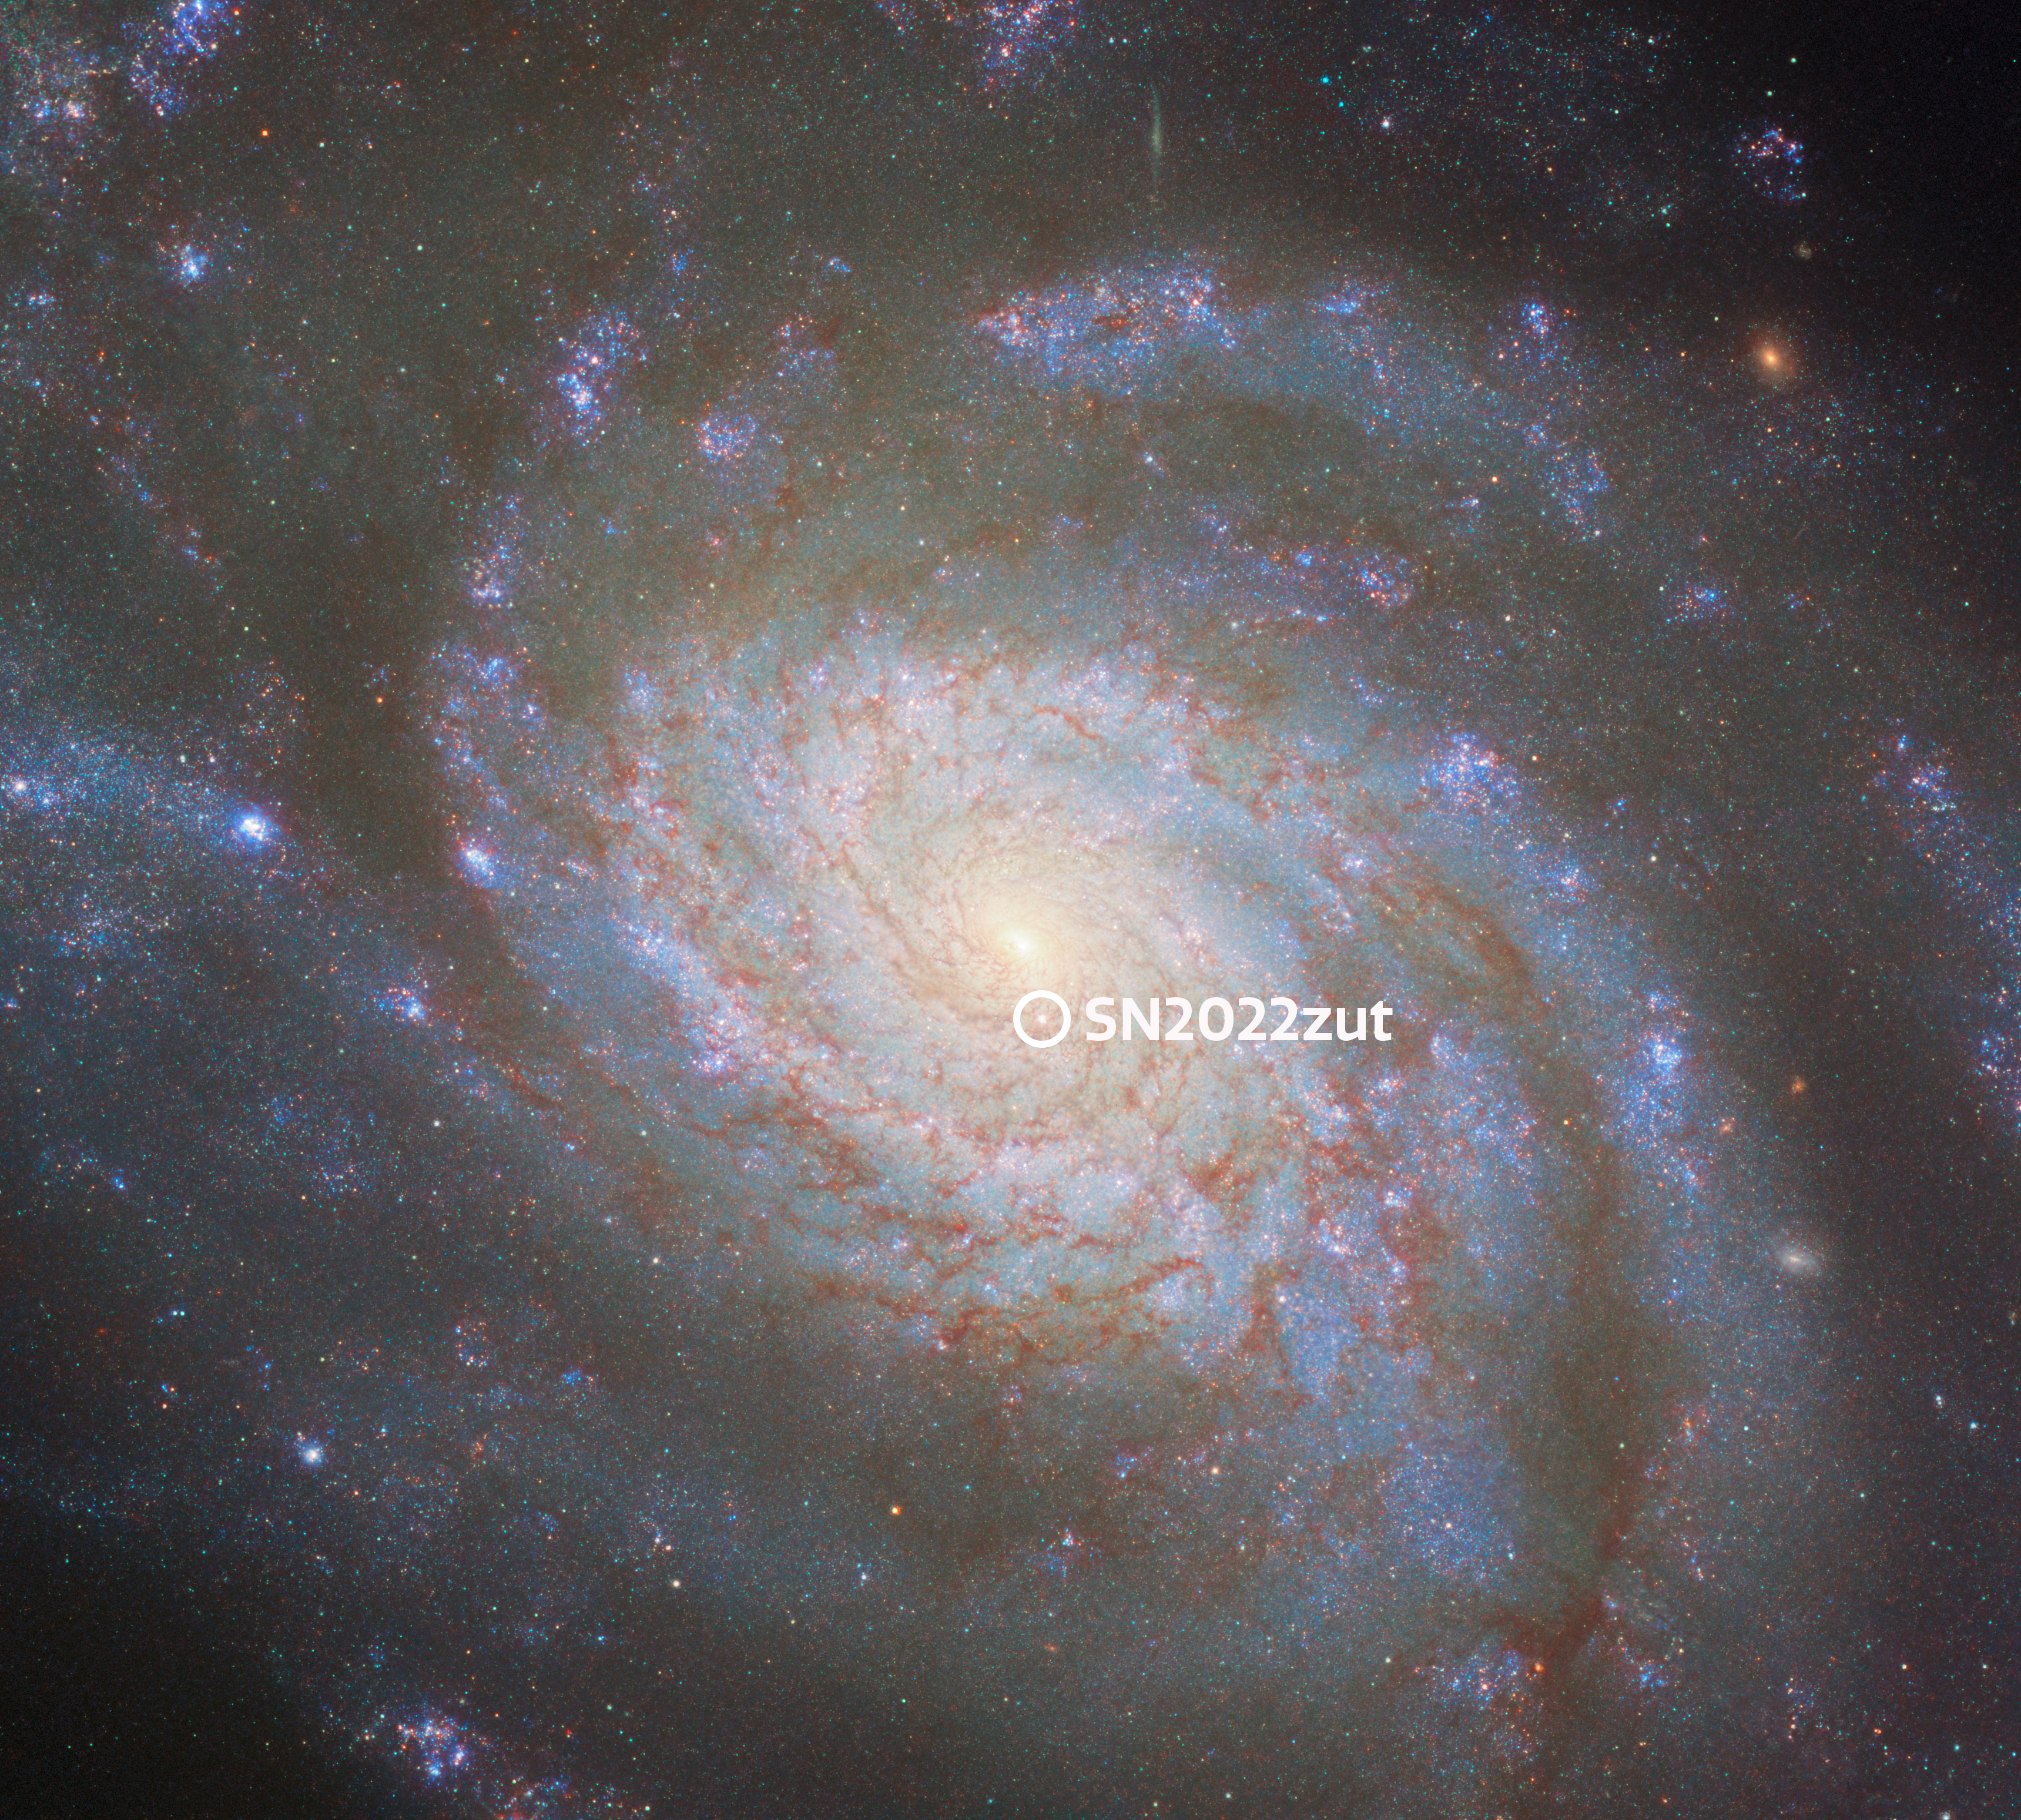

NGC 3810 with annotated supernova

This image depicts the spiral galaxy NGC 3810, which in 2023 was included in a Hubble programme to improve the accuracy of distance measurements made using Type Ia supernovae. This was only possible because a white dwarf in NGC 3810 had just gone supernova, and Hubble captured this image before the supernova faded from view.

Supernovae are named for their year of discovery, followed by an incrementing tag of letters — a, b, and so on. Nowadays, with automated surveys, thousands of supernovae are discovered every year, and so this one received the name SN 2022zut, as the eighteen thousand, one hundred and forty-second found in 2022!

Learn more about this galaxy and Type Ia supernova at the main image, here.

Credit: ESA/Hubble & NASA, D. Sand, R. J. Foley